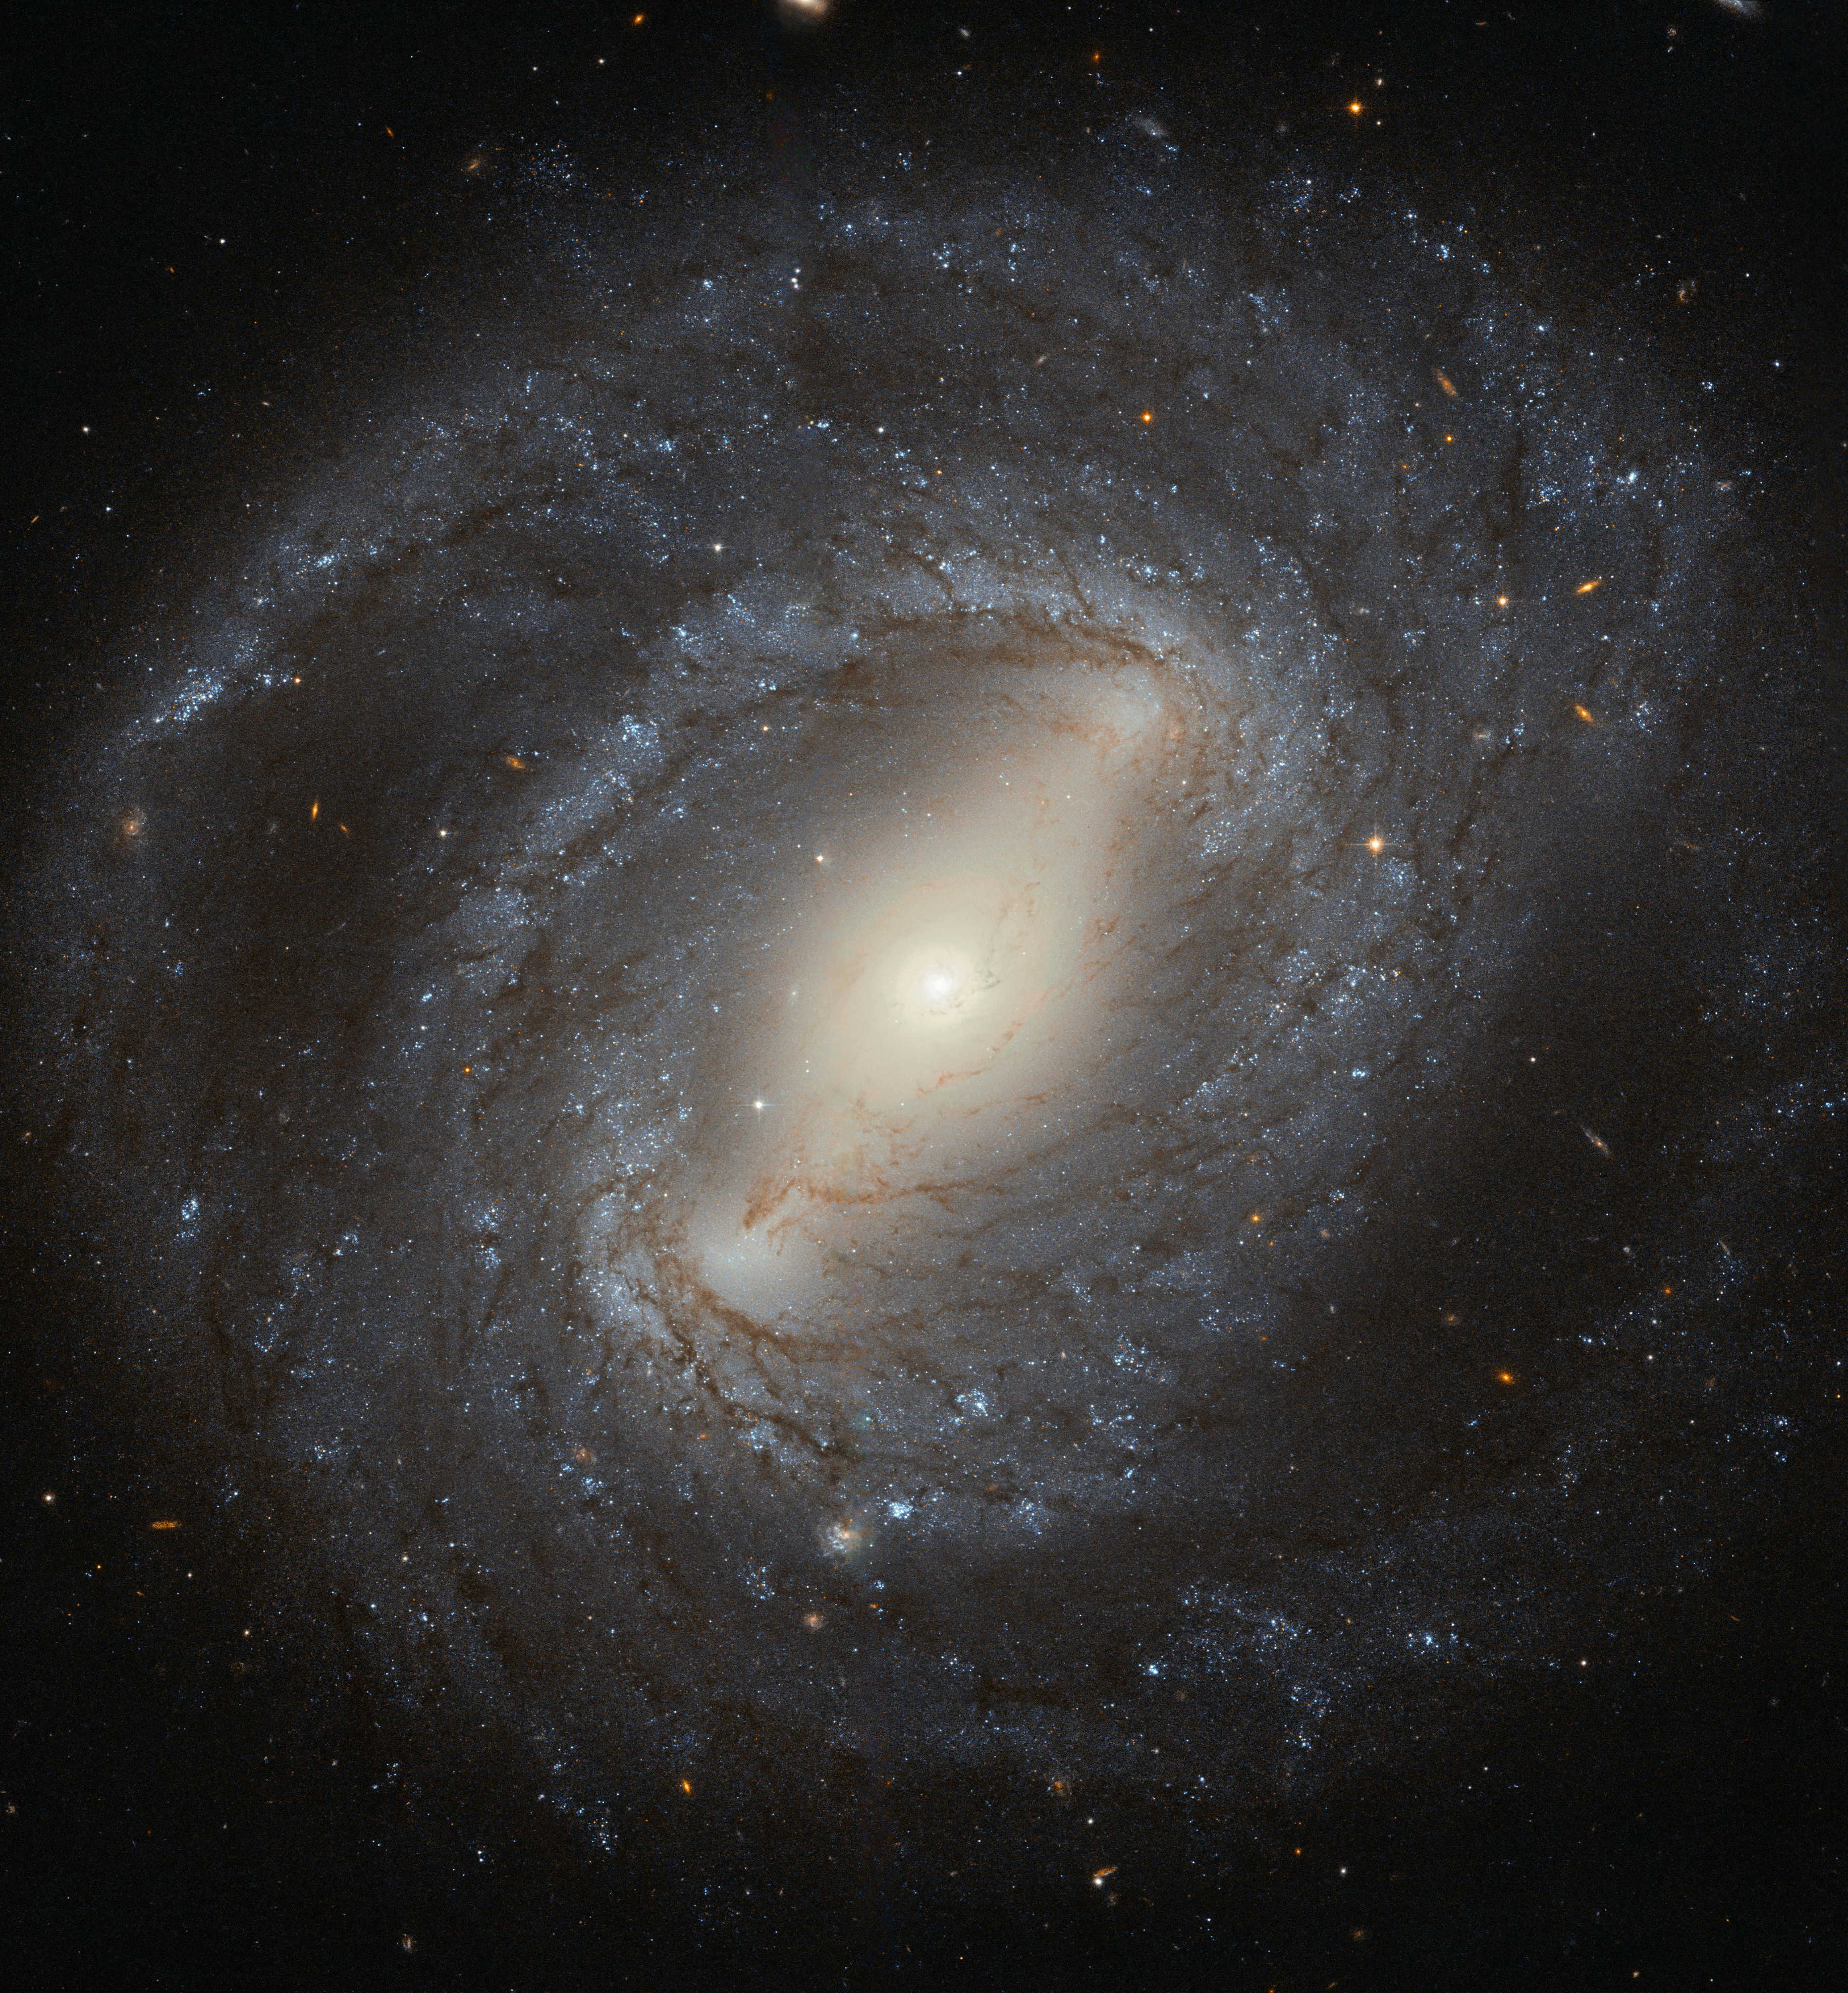

Hubble spies NGC 4394

Discovered in 1784 by the German–British astronomer William Herschel, NGC 4394 is a barred spiral galaxy situated about 55 million light-years from Earth. The galaxy lies in the constellation of Coma Berenices (Berenice's Hair), and is considered to be a member of the Virgo Cluster.

NGC 4394 is the archetypal barred spiral galaxy, with bright spiral arms emerging from the ends of a bar that cuts through the galaxy’s central bulge. These arms are peppered with young blue stars, dark filaments of cosmic dust, and bright, fuzzy regions of active star formation. At the centre of NGC 4394 lies a region of ionised gas known as a LINER. LINERs are active regions that display a characteristic set of emission lines in their spectra— mostly weakly ionised atoms of oxygen, nitrogen and sulphur.

Although LINER galaxies are relatively common, it’s still unclear where the energy comes from to ionise the gas. In most cases it is thought to be the influence of a black hole at the centre of the galaxy, but it could also be the result of a high level of star formation. In the case of NGC 4394, it is likely that gravitational interaction with a nearby neighbour has caused gas to flow into the galaxy’s central region, providing a new reservoir of material to fuel the black hole or to make new stars.

Credit: ESA/Hubble & NASA Acknowledgement: Judy Schmidt (Geckzilla)